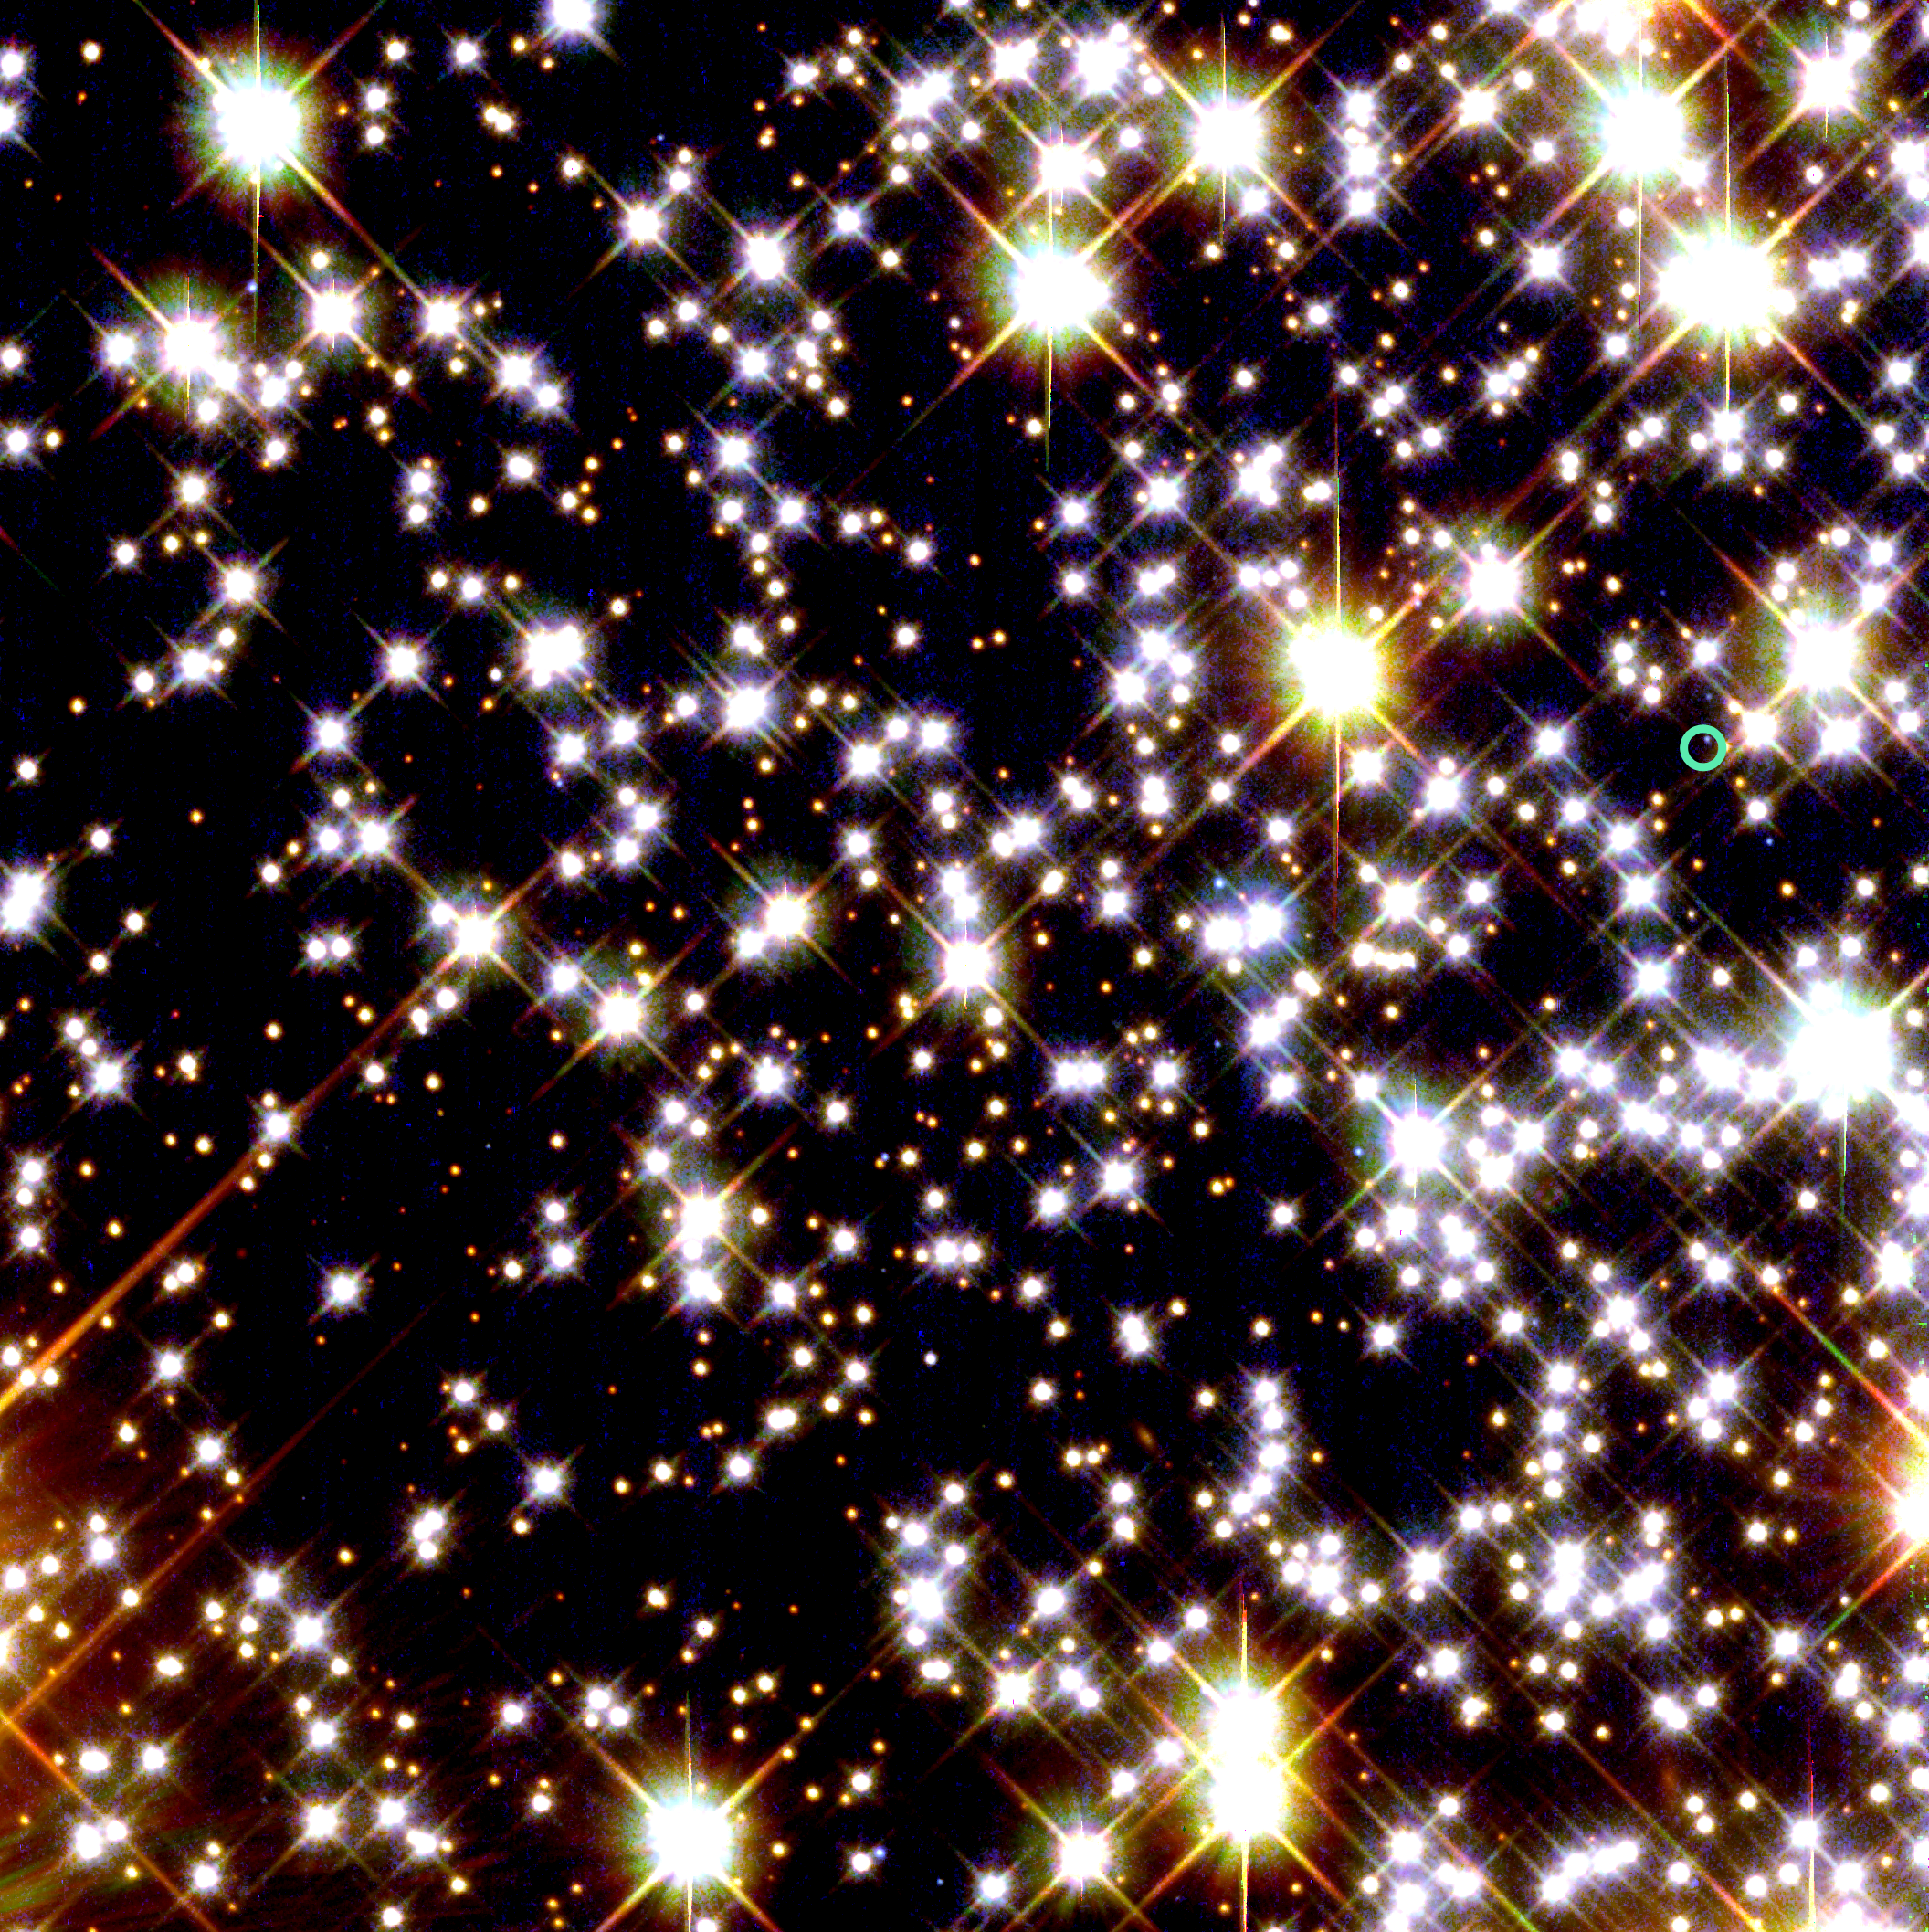

HST/WFPC2 Image with Location of Pulsar

The green circle in the image marks the location of a pulsar orbited by the oldest known planet.

Credit: NASA/ESA and H. Richer (University of British Columbia)